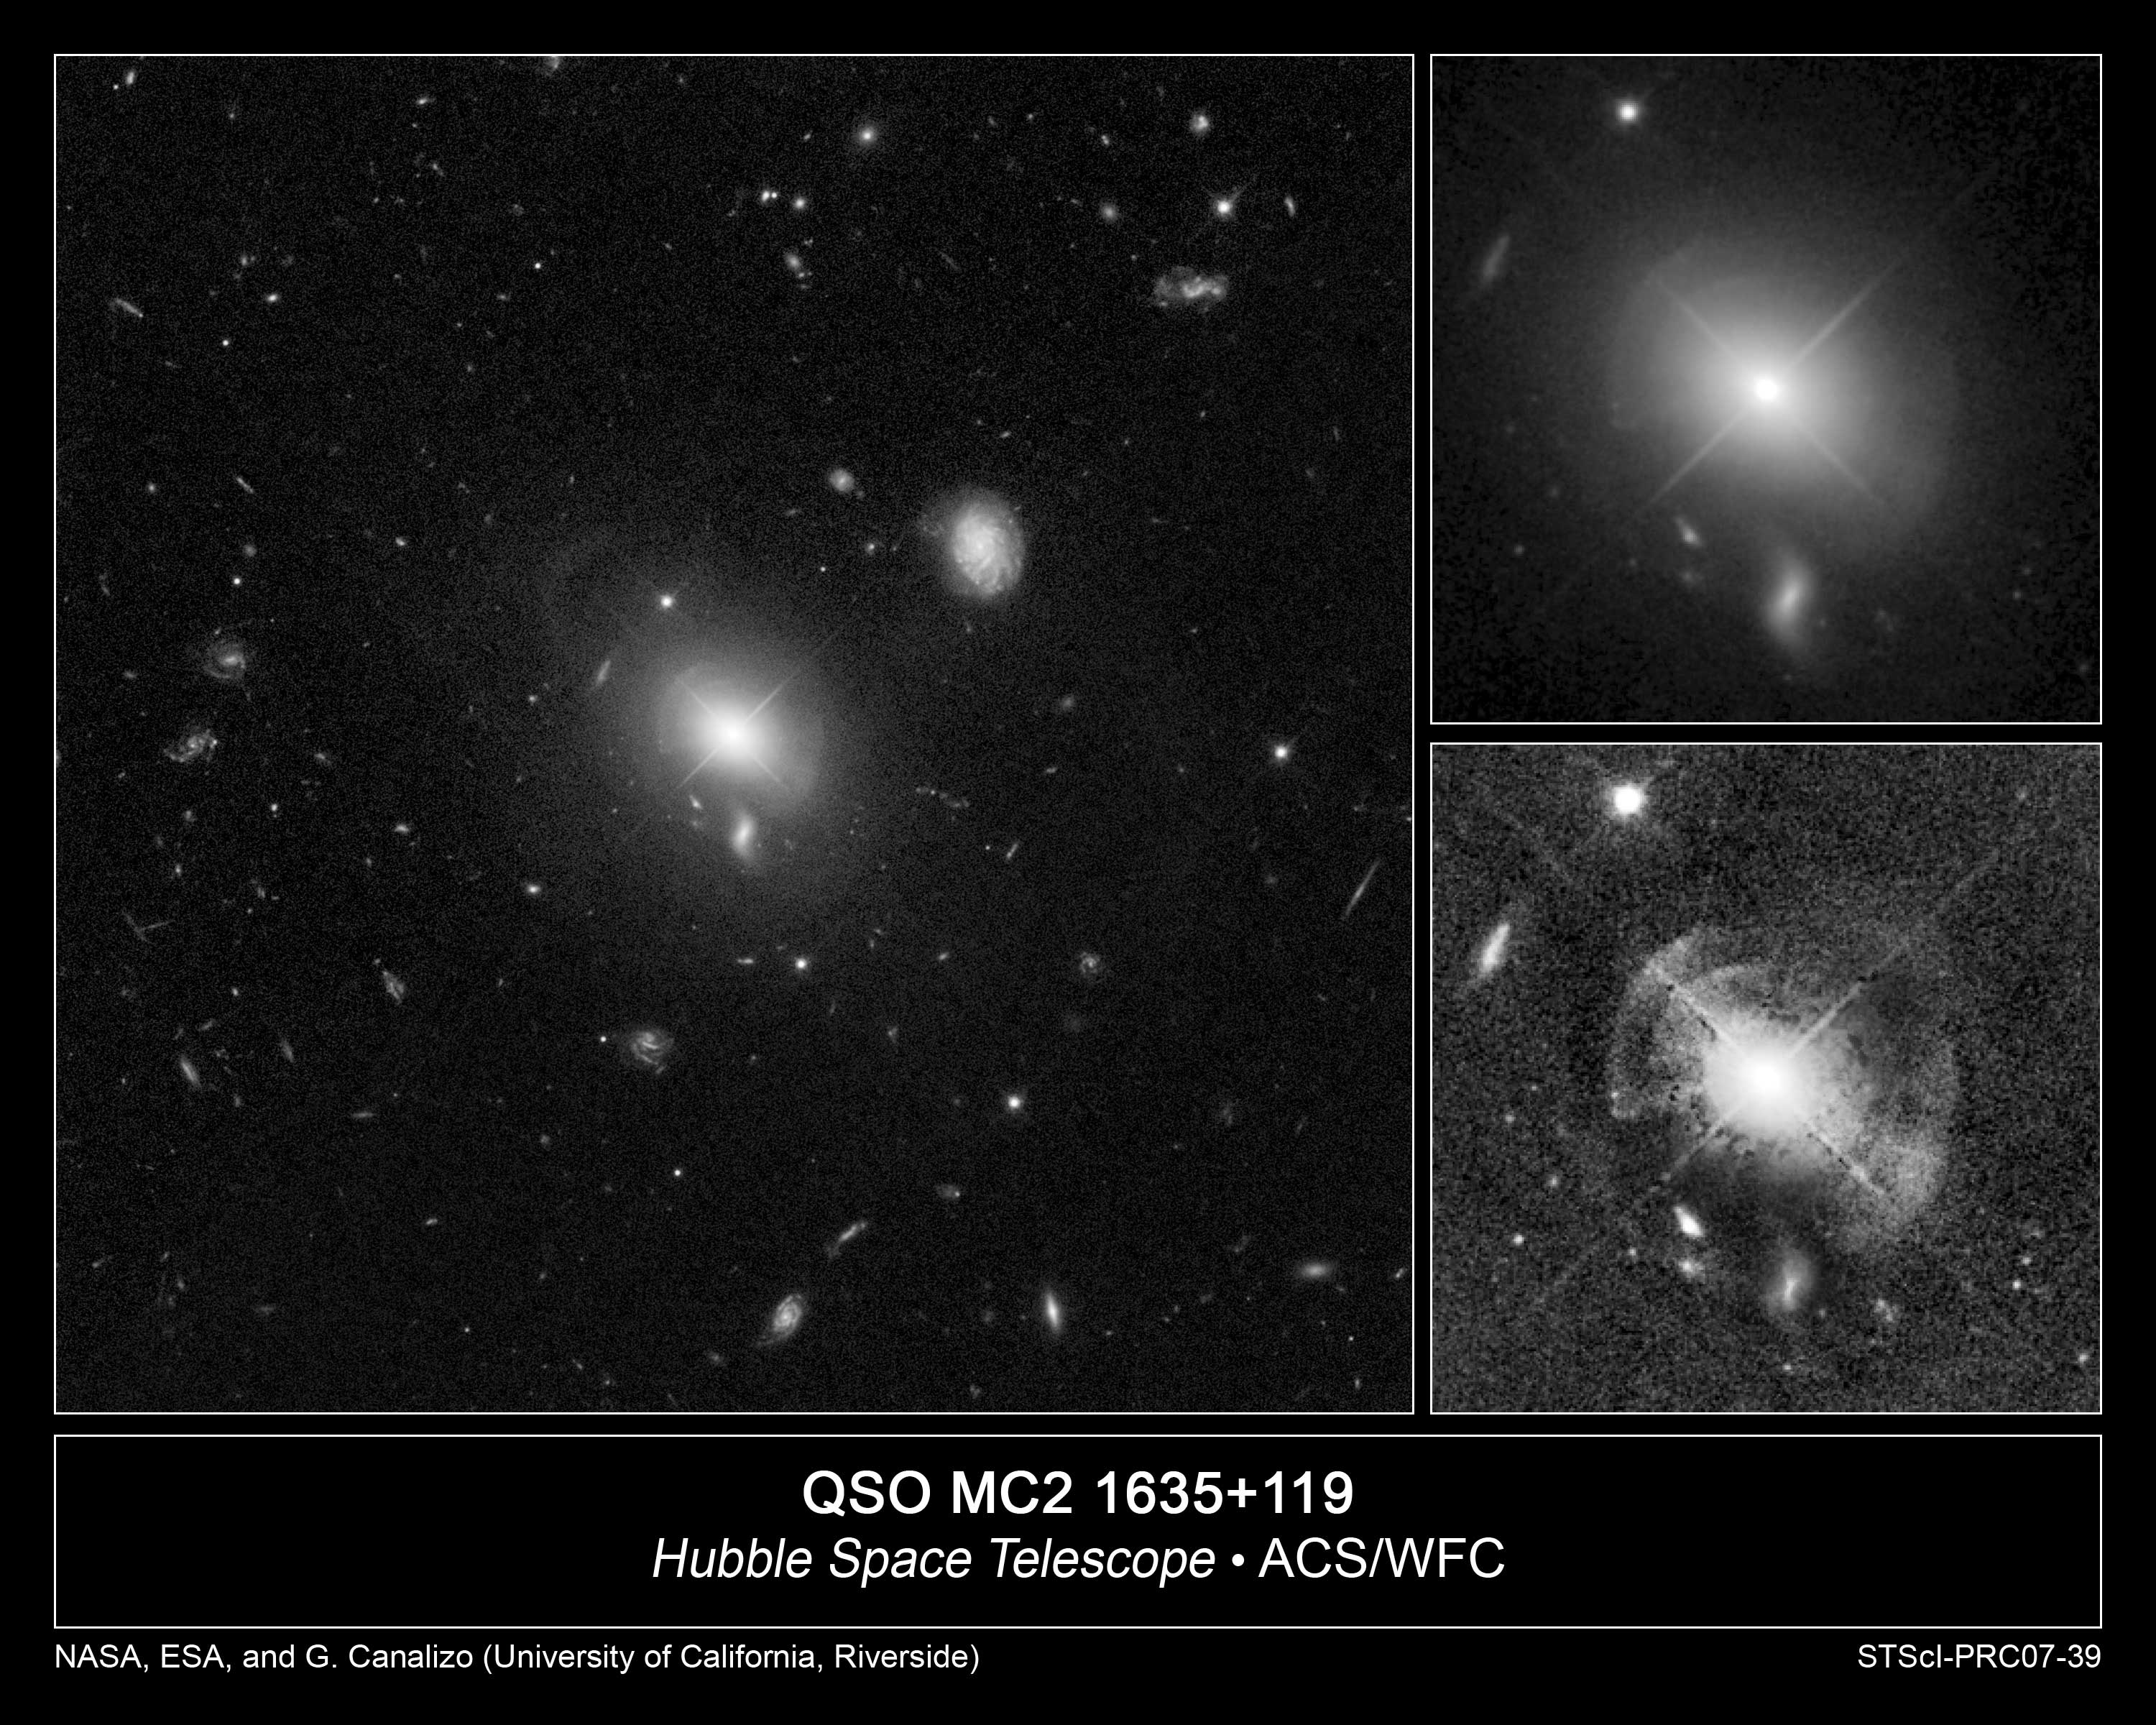

Shells of stars ring quasar in giant elliptical galaxy

These sharp images taken with NASA's Hubble Space Telescope reveal at least five shells of stars surrounding a brilliant quasar at the heart of a giant elliptical galaxy. The image at left shows the quasar, known as MC2 1635+119, and its host galaxy [center] against a backdrop of distant galaxies. In the image at top,right, the shells can barely be seen because of the bright light from the central quasar.

Credit: NASA, ESA, and G. Canalizo (University of California, Riverside)